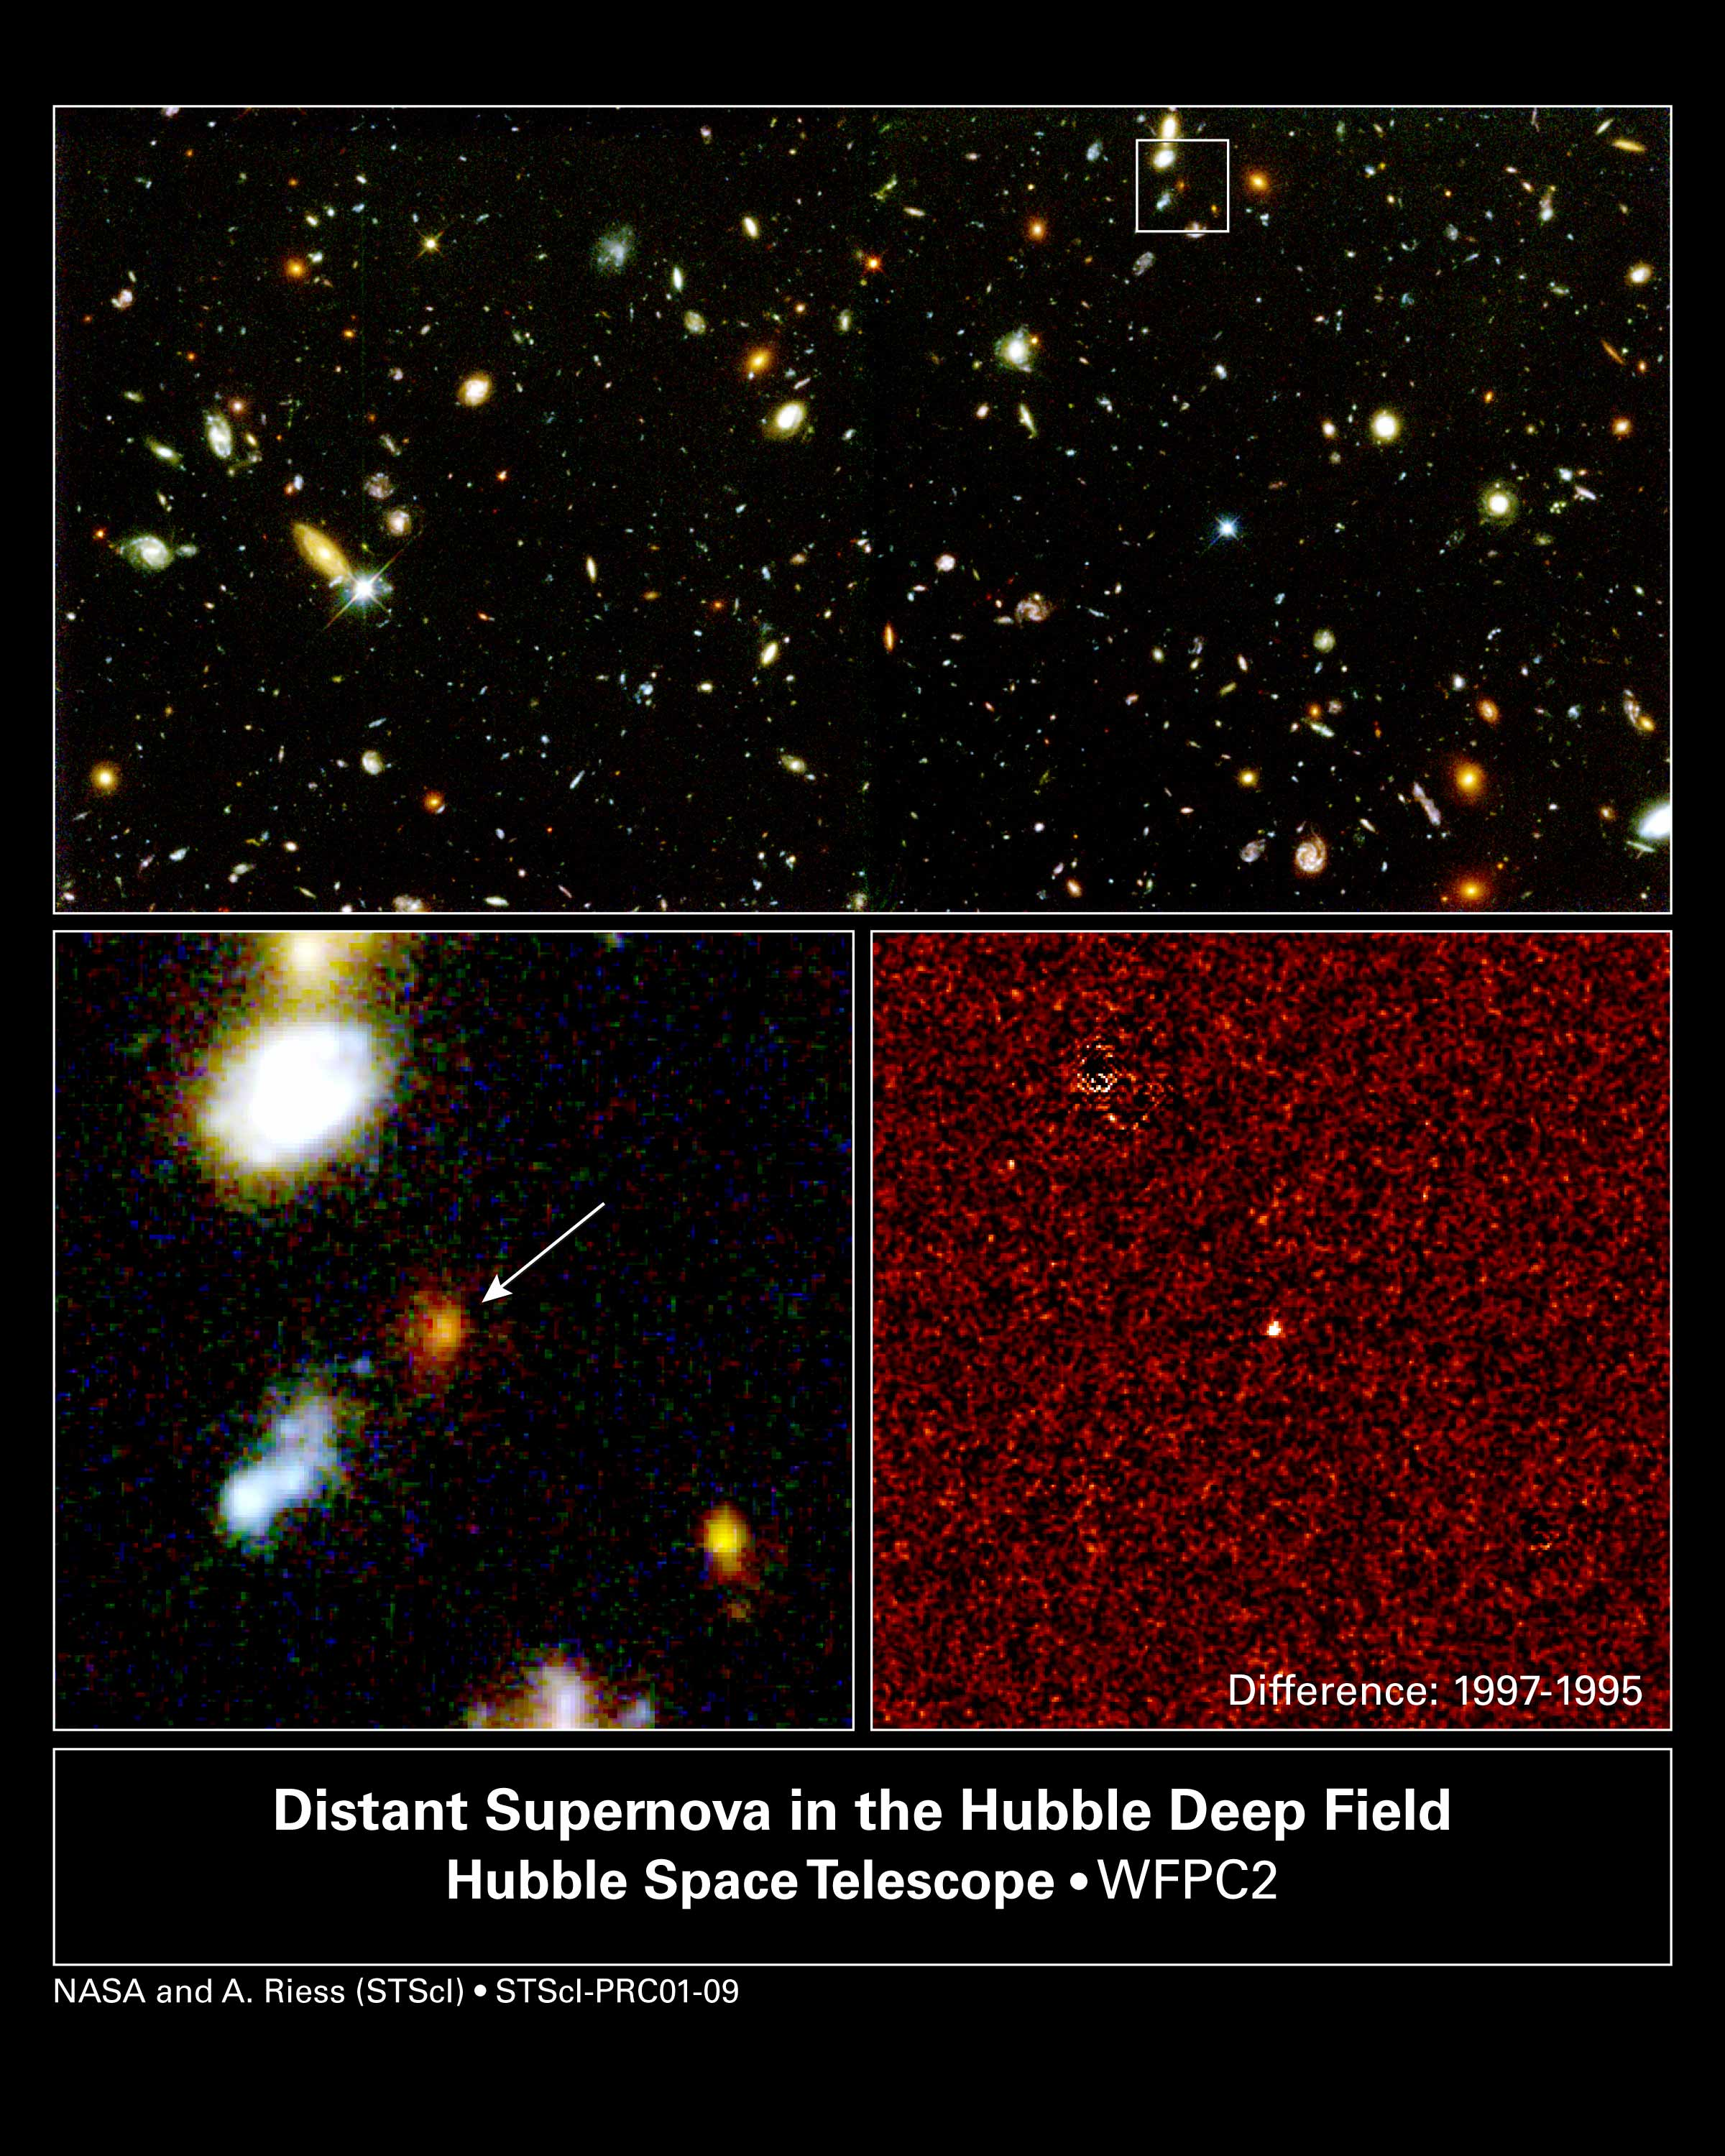

Farthest Supernova Ever - SN 1997ff (Overview)

Using the NASA/ESA Hubble Space Telescope, astronomers pinpointed a blaze of light from the farthest supernova ever seen, a dying star that exploded 10 billion years ago.

The detection and analysis of this supernova, called 1997ff, is greatly bolstering the case for the existence of a mysterious form of dark energy pervading the cosmos, making galaxies hurl ever faster away from each other. The supernova also offers the first glimpse of the universe slowing down soon after the Big Bang, before it began speeding up.

Credit: NASA/ESA, Adam Riess ( Space Telescope Science Institute, Baltimore, MD)